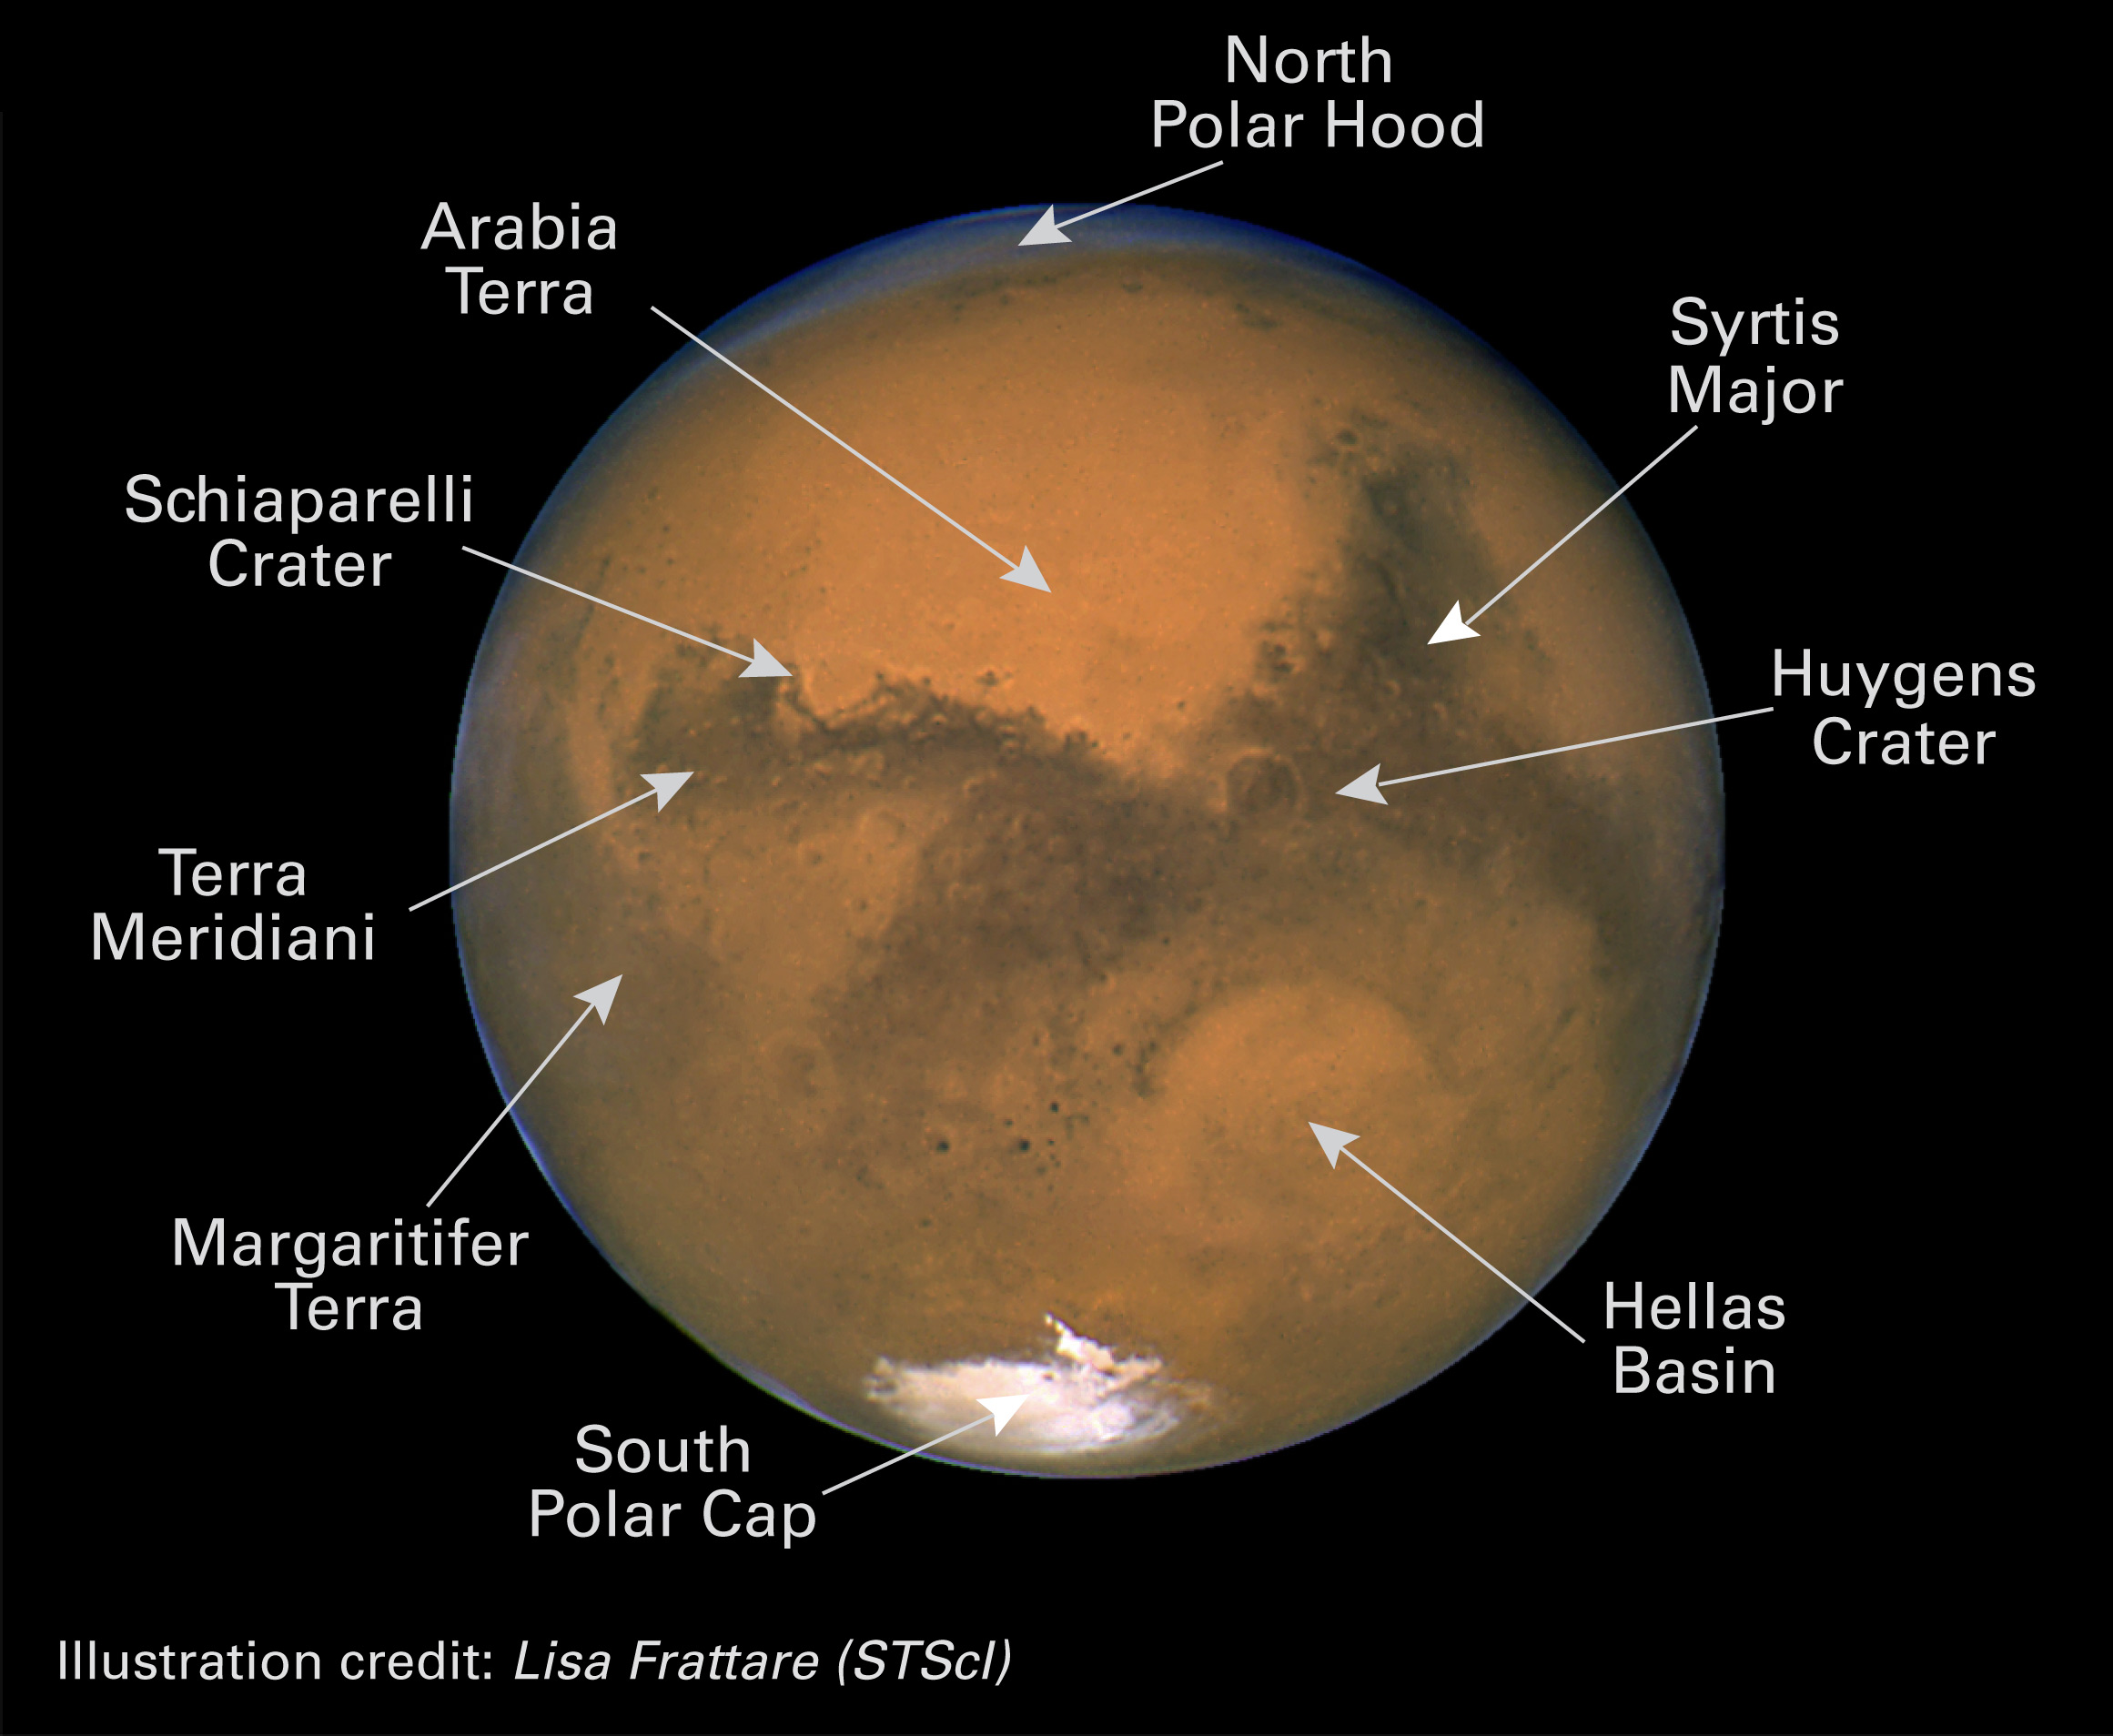

Annotated Mars

Hubble image of Mars, showing various details such as the south pole and craters.

Credit: NASA/ESA and Lisa Frattare (STScI)